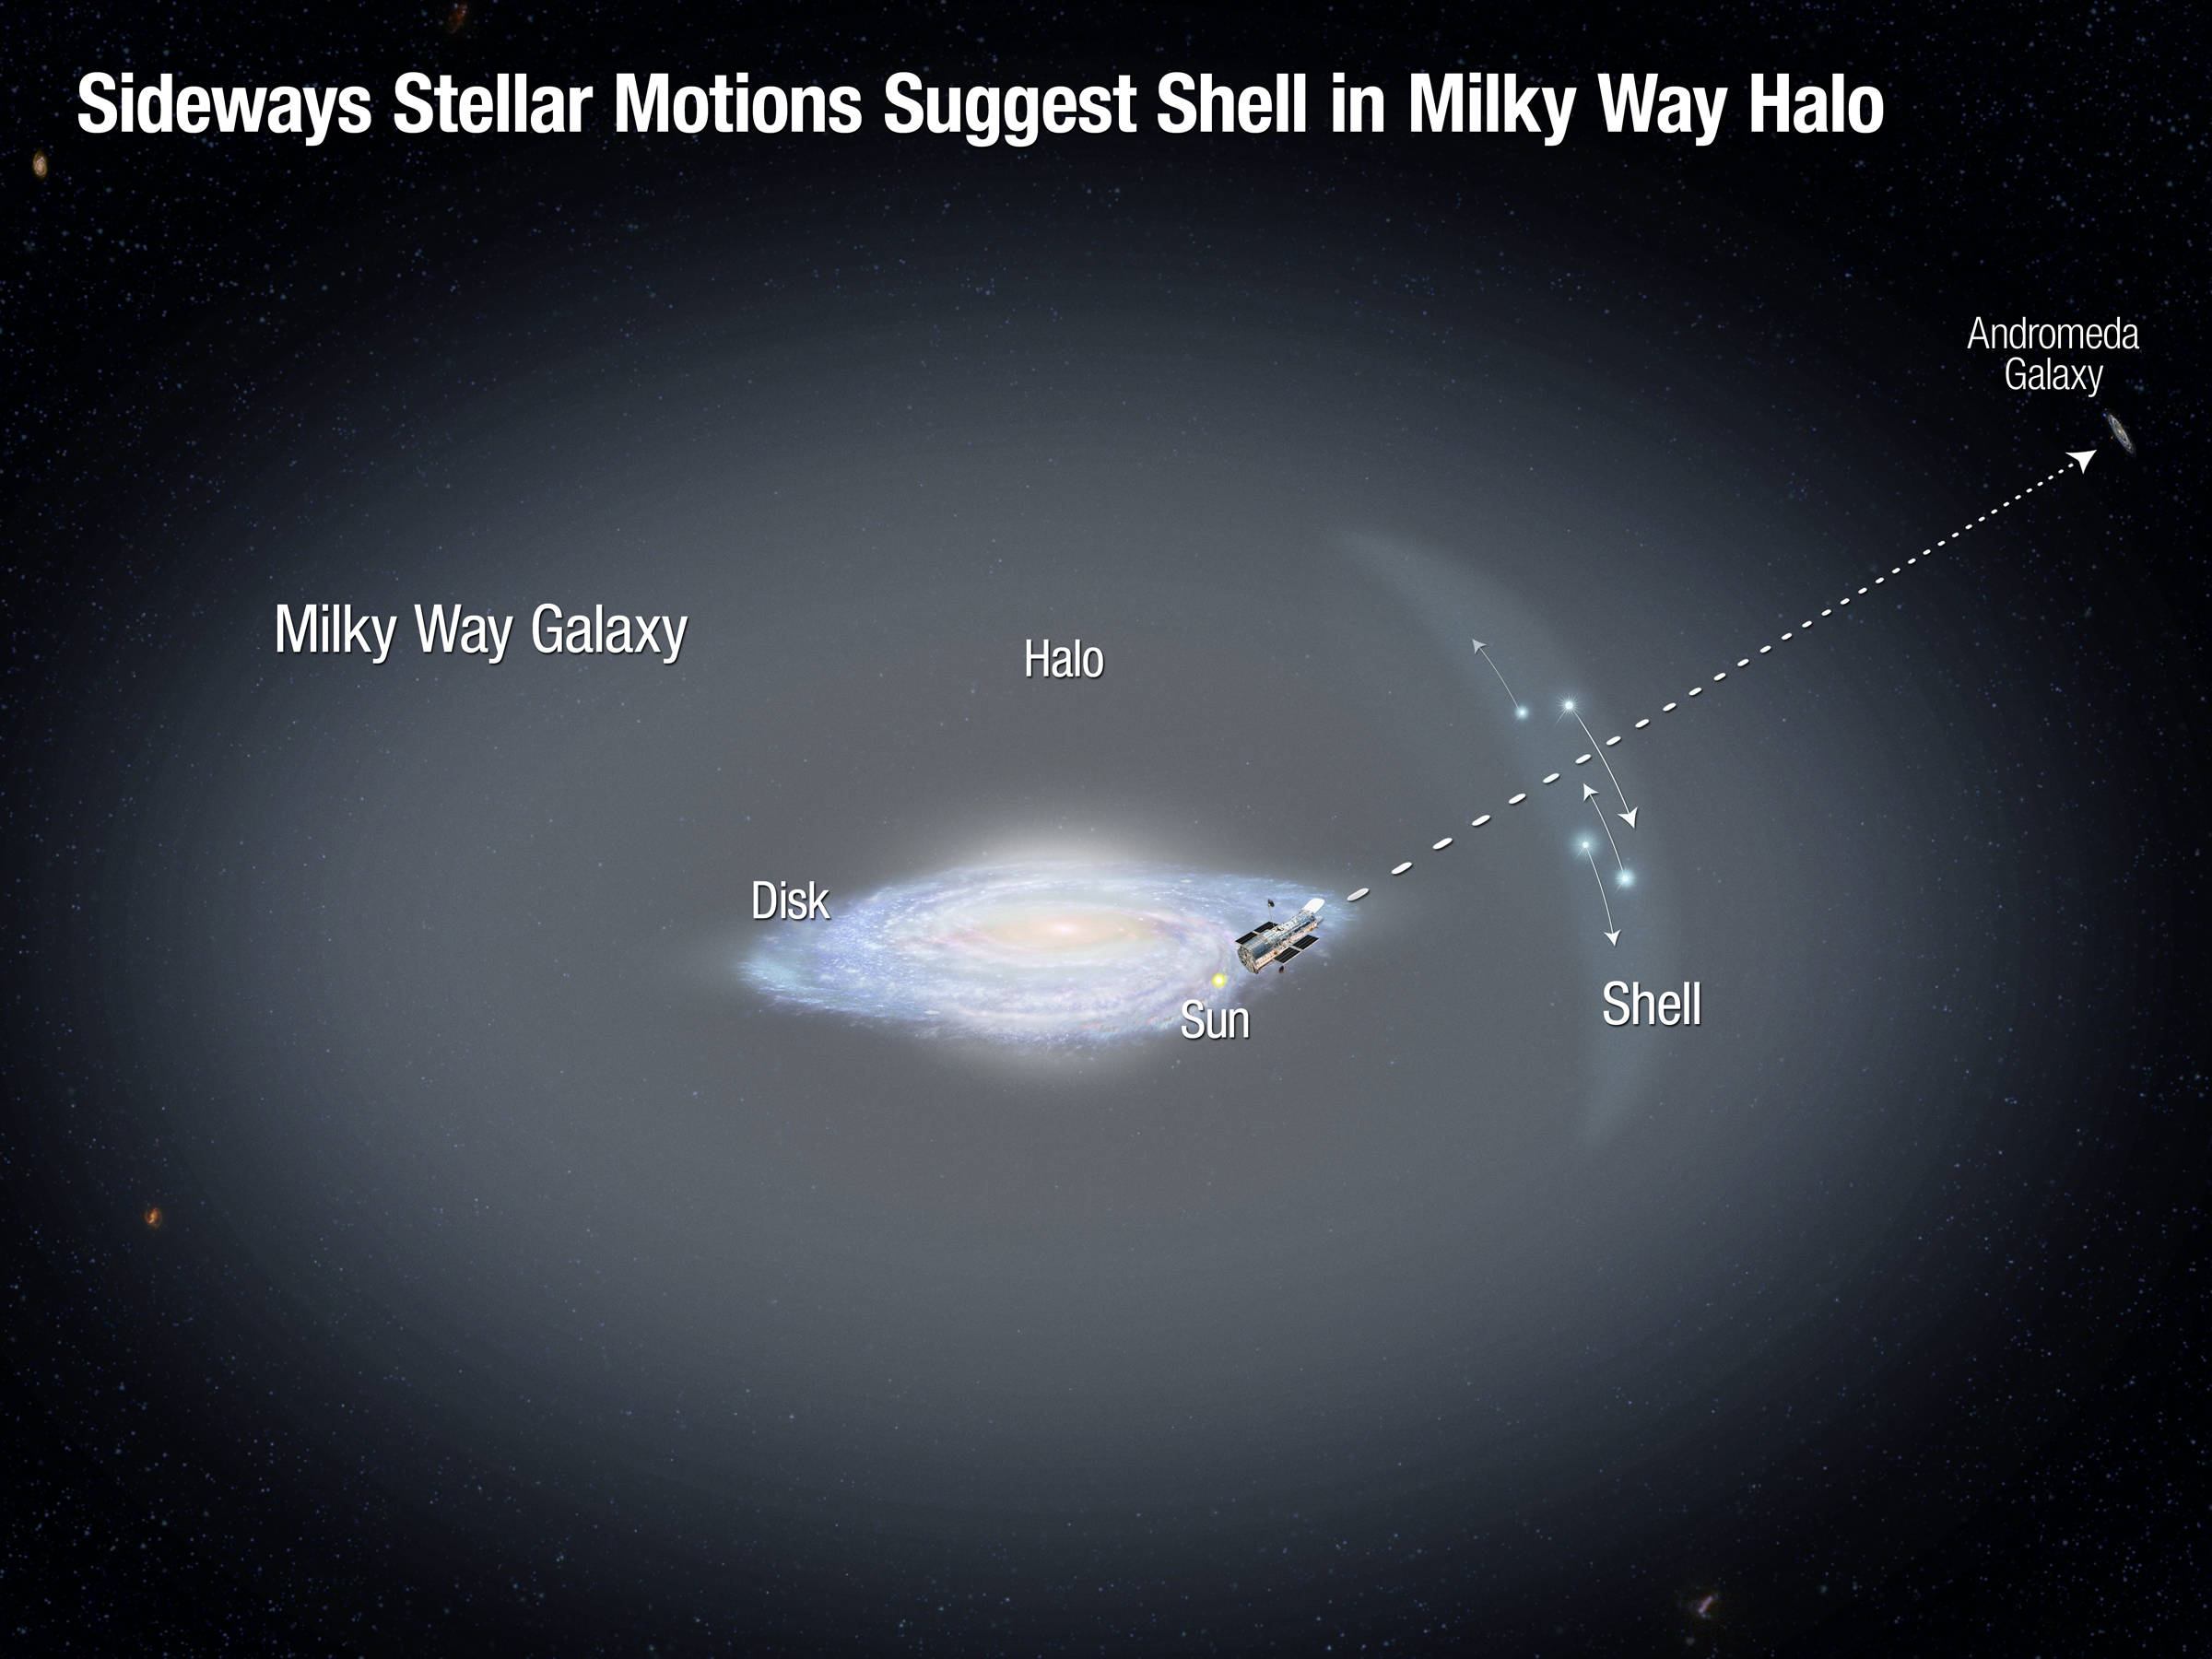

Stellar Motions of Halo Stars in Milky Way

This illustration shows the disc of our Milky Way galaxy, surrounded by a faint, extended halo of old stars. Astronomers using the Hubble Space Telescope to observe the nearby Andromeda galaxy serendipitously identified a dozen foreground stars in the Milky Way halo. They measured the first sideways motions (represented by the arrows) for such distant halo stars. The motions indicate the possible presence of a shell in the halo, which may have formed from the accretion of a dwarf galaxy. This observation supports the view that the Milky Way has undergone continuing growth and evolution over its lifetime by consuming smaller galaxies.

Credit: NASA, ESA, and A. Feild (STScI)